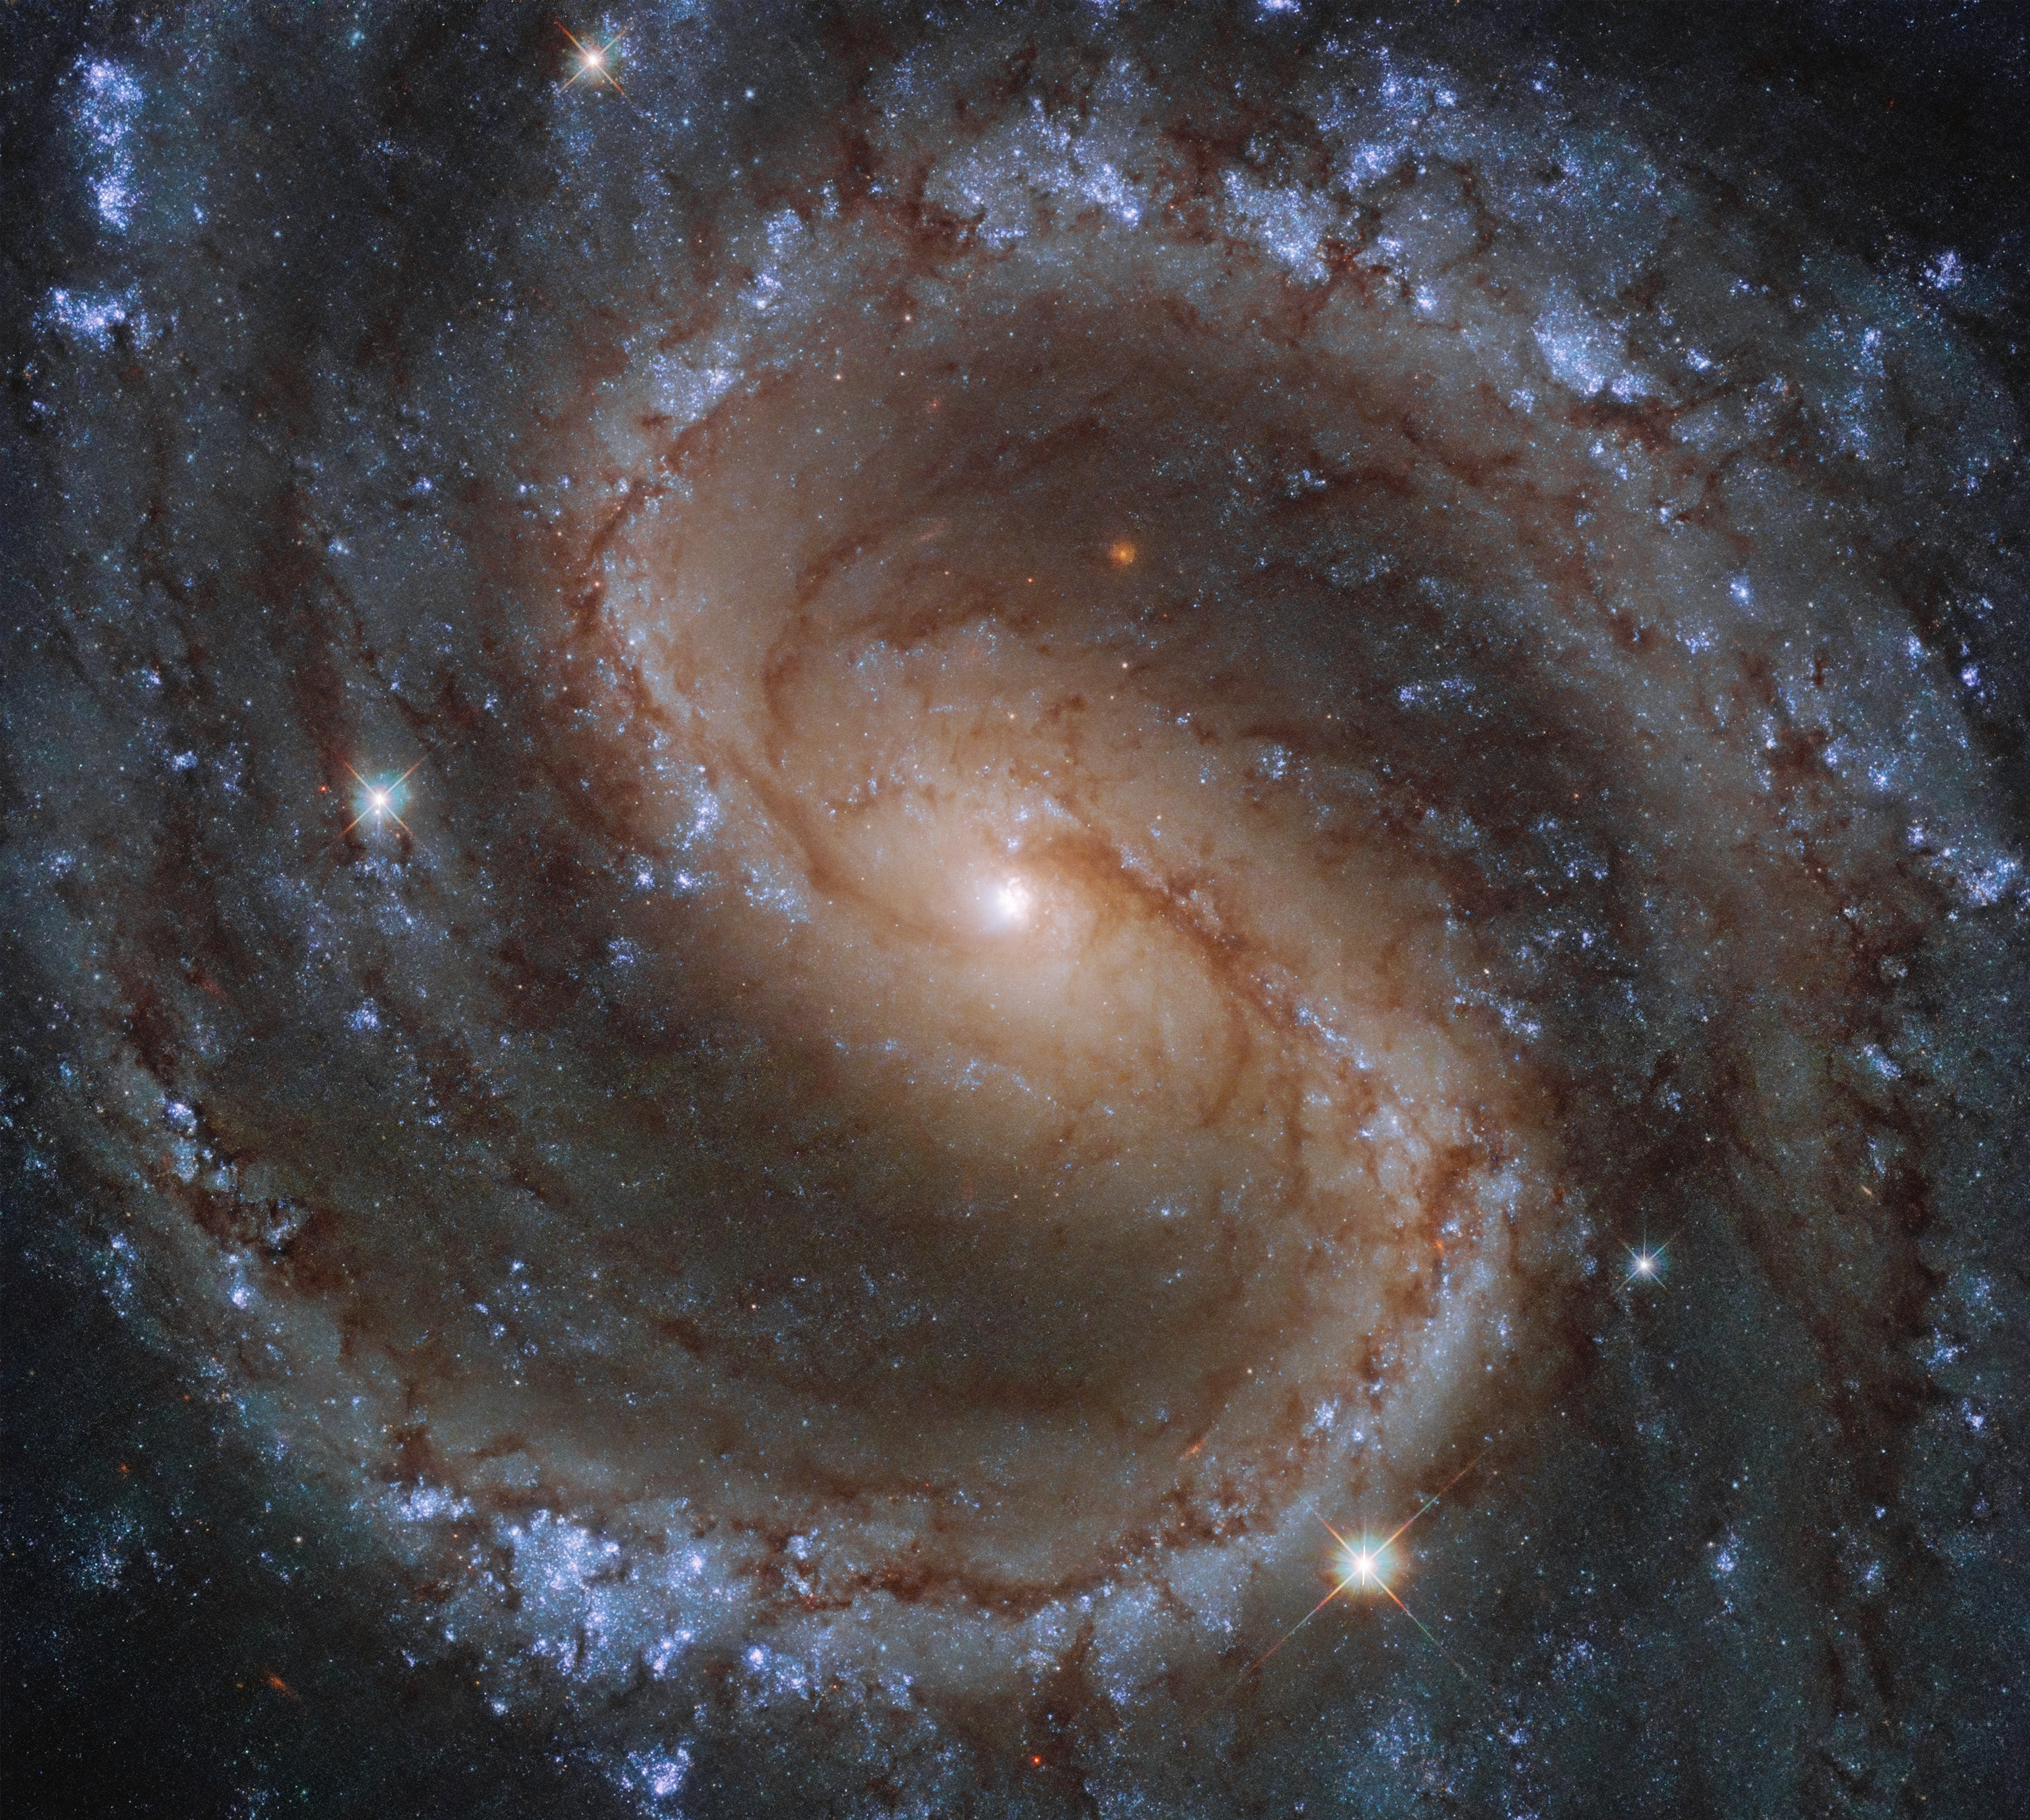

Colours of the Lost Galaxy

Located in the constellation of Virgo (The Virgin), around 50 million light-years from Earth, NGC 4535 is truly a stunning sight to behold. Despite the incredible quality of this image, taken from the NASA/ESA Hubble Space Telescope, NGC 4535 has a hazy, somewhat ghostly, appearance when viewed from a smaller telescope. This led amateur astronomer Leland S. Copeland to nickname NGC 4535 the “Lost Galaxy” in the 1950s.

The bright colours in this image aren’t just beautiful to look at, as they actually tell us about the population of stars within this barred spiral galaxy. The bright blue-ish colours, seen nestled amongst NGC 4535’s long, spiral arms, indicate the presence of a greater number of younger and hotter stars. In contrast, the yellower tones of this galaxy’s bulge suggest that this central area is home to stars which are older and cooler.

This galaxy was studied as part of the PHANGS survey, which aims to clarify many of the links between cold gas clouds, star formation, and the overall shape and other properties of galaxies. On 11 January 2021 the first release of the PHANGS-HST Collection was made publicly available.

Credit: ESA/Hubble & NASA, J. Lee and the PHANGS-HST Team